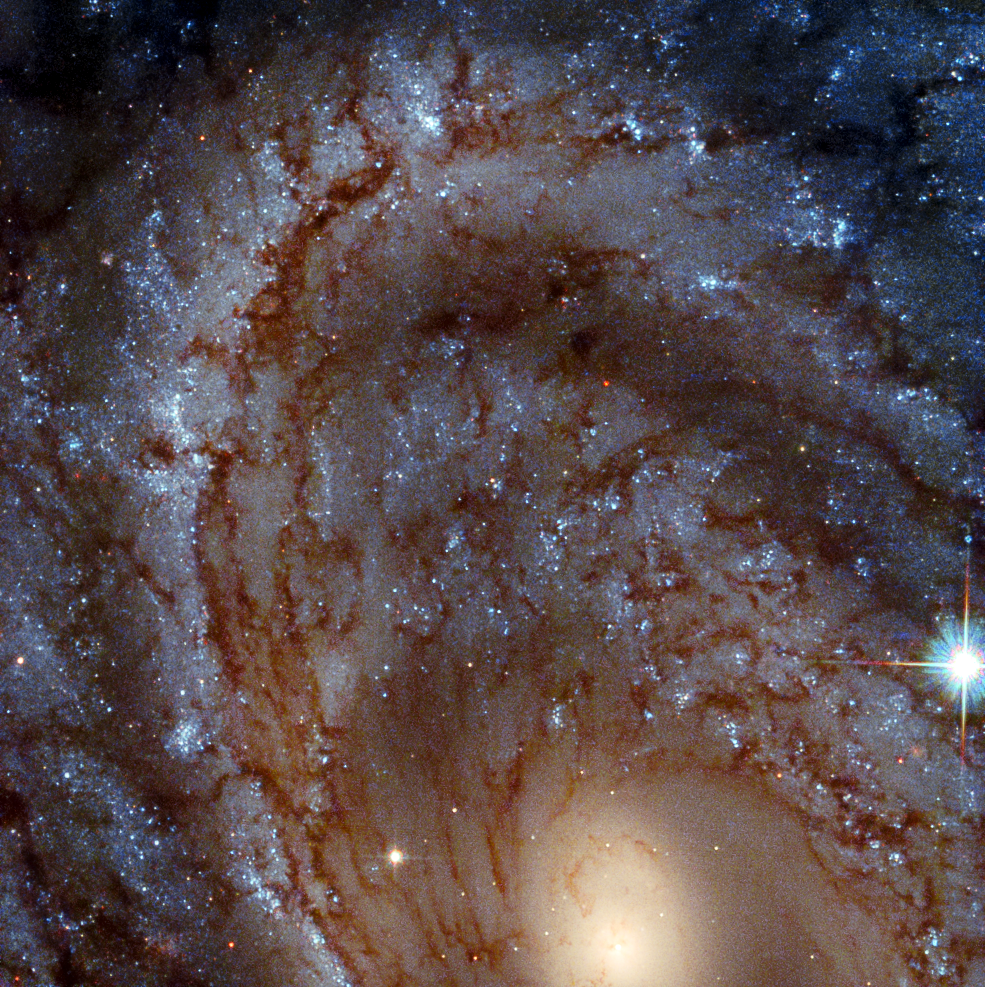

Galactic Close-Up

This image shows a close-up portrait of the magnificent spiral galaxy NGC 4603, which lies over 100 million light-years away in the constellation of Centaurus (The Centaur). Bright bands of blue young stars make up the arms of this galaxy, which wind lazily outwards from the luminous core. The intricate red-brown filaments threading through the spiral arms are known as dust lanes, and consist of dense clouds of dust which obscure the diffuse starlight from the galaxy.

This galaxy is a familiar subject for Hubble. In the last years of the twentieth century, NGC 4603 was keenly and closely watched for signs of a peculiar class of stars known as Cepheid variables. These stars have a luminosity closely tied to the period with which they darken and brighten, allowing astronomers to accurately measure how far they are from Earth. Distance measurements from Cepheid variables are key to measuring the furthest distances in the Universe, and were one of the factors used by Georges Lemaître and Edwin Hubble to show that the Universe is expanding.

Credit: ESA/Hubble & NASA, J. Maund